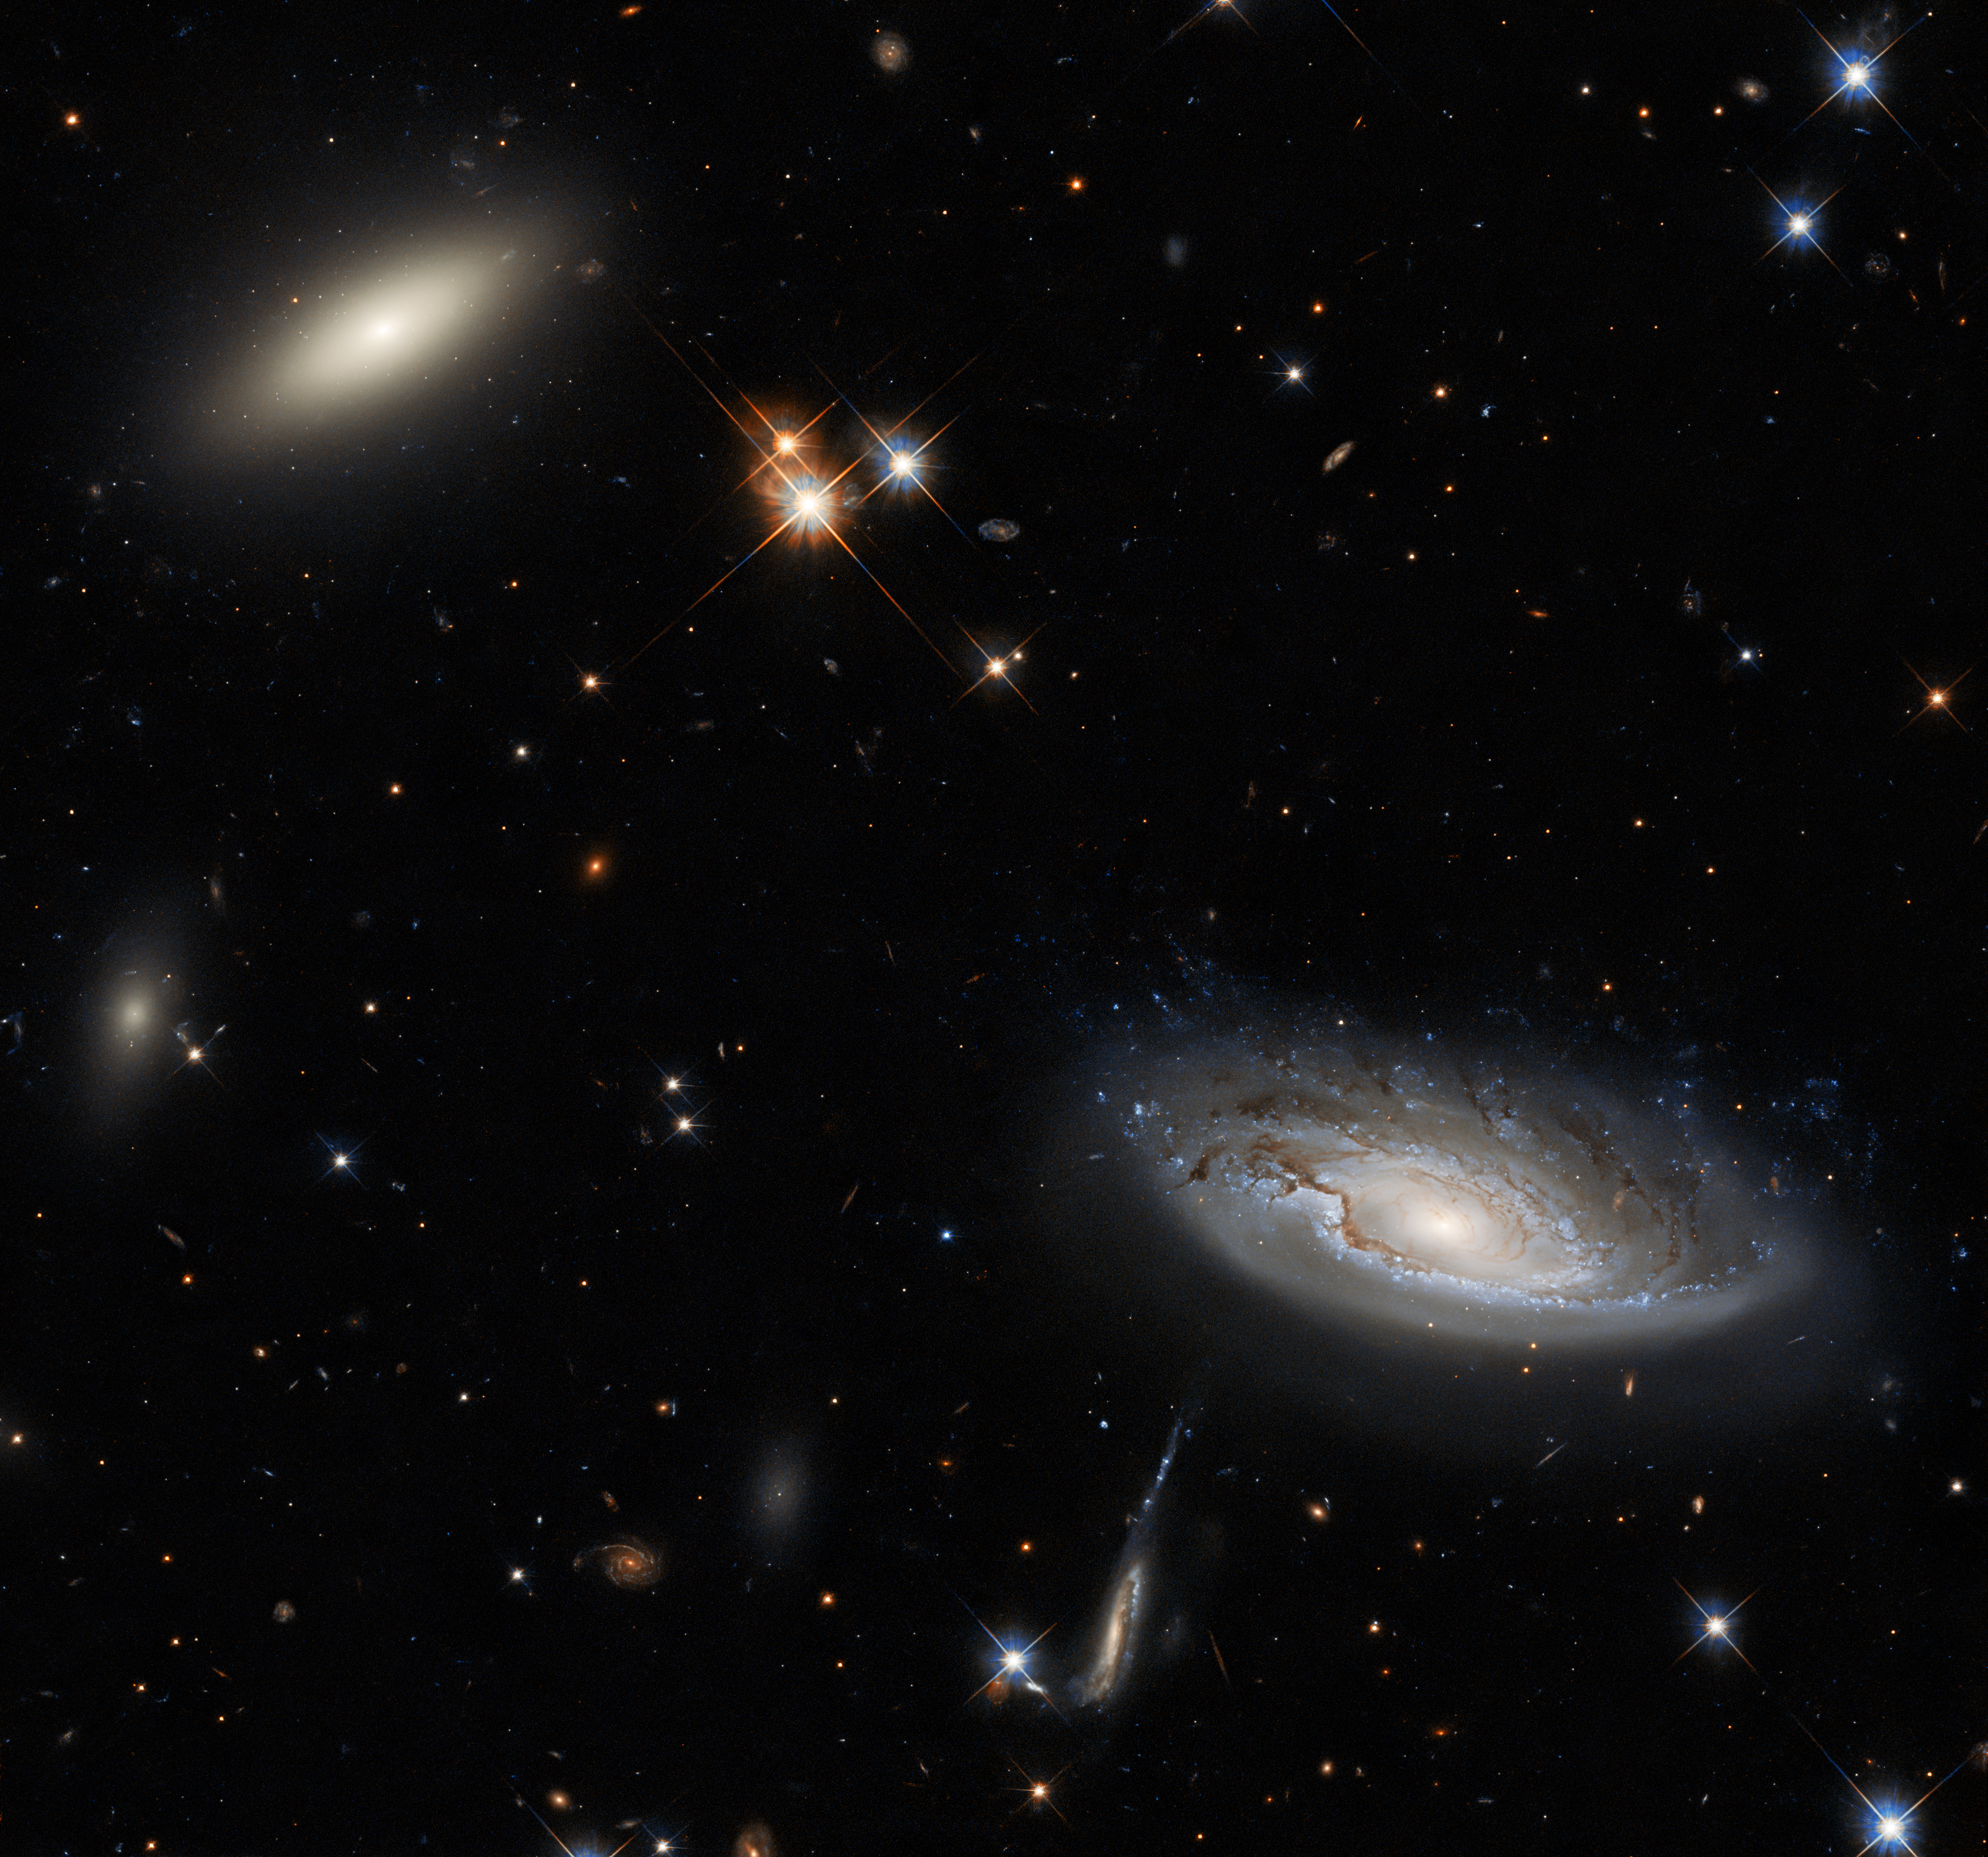

One of the Greats

Two things capture your attention in this spectacular Picture of the Week, which was taken using Hubble’s Wide Field Camera 3 (WFC3): the two enormous galaxies that flank the left and right sides of the image. The galaxy on the left is a lenticular galaxy, which rejoices in the name of 2MASX J03193743+4137580. The side-on spiral galaxy on the right is more simply named UGC 2665. Both galaxies lie approximately 350 million light-years from Earth, and they both form part of the enormous Perseus galaxy cluster.

Perseus is an important figure in Greek mythology, renowned for slaying Medusa the Gorgon — who is herself famous for the unhappy reason that she was cursed to have living snakes for hair. Given Perseus’s impressive credentials, it seems appropriate that the eponymous galaxy cluster is one of the biggest objects in the known Universe, consisting of thousands of galaxies, only a few of which are visible in this image. The wonderful detail in the image is thanks to the WFC3’s powerful resolution and high sensitivity. The WFC3 is sensitive to both visible and infrared light, so those are the wavelengths that are captured in this image. The Perseus supercluster looks very different at other wavelengths. Whilst in this image the spaces between the galaxies appear dark and peaceful, when the X-ray emission is observed the Perseus cluster appears to be burning with bright intense light.

Credit: ESA/Hubble & NASA, W. Harris Acknowledgement: L. Shatz